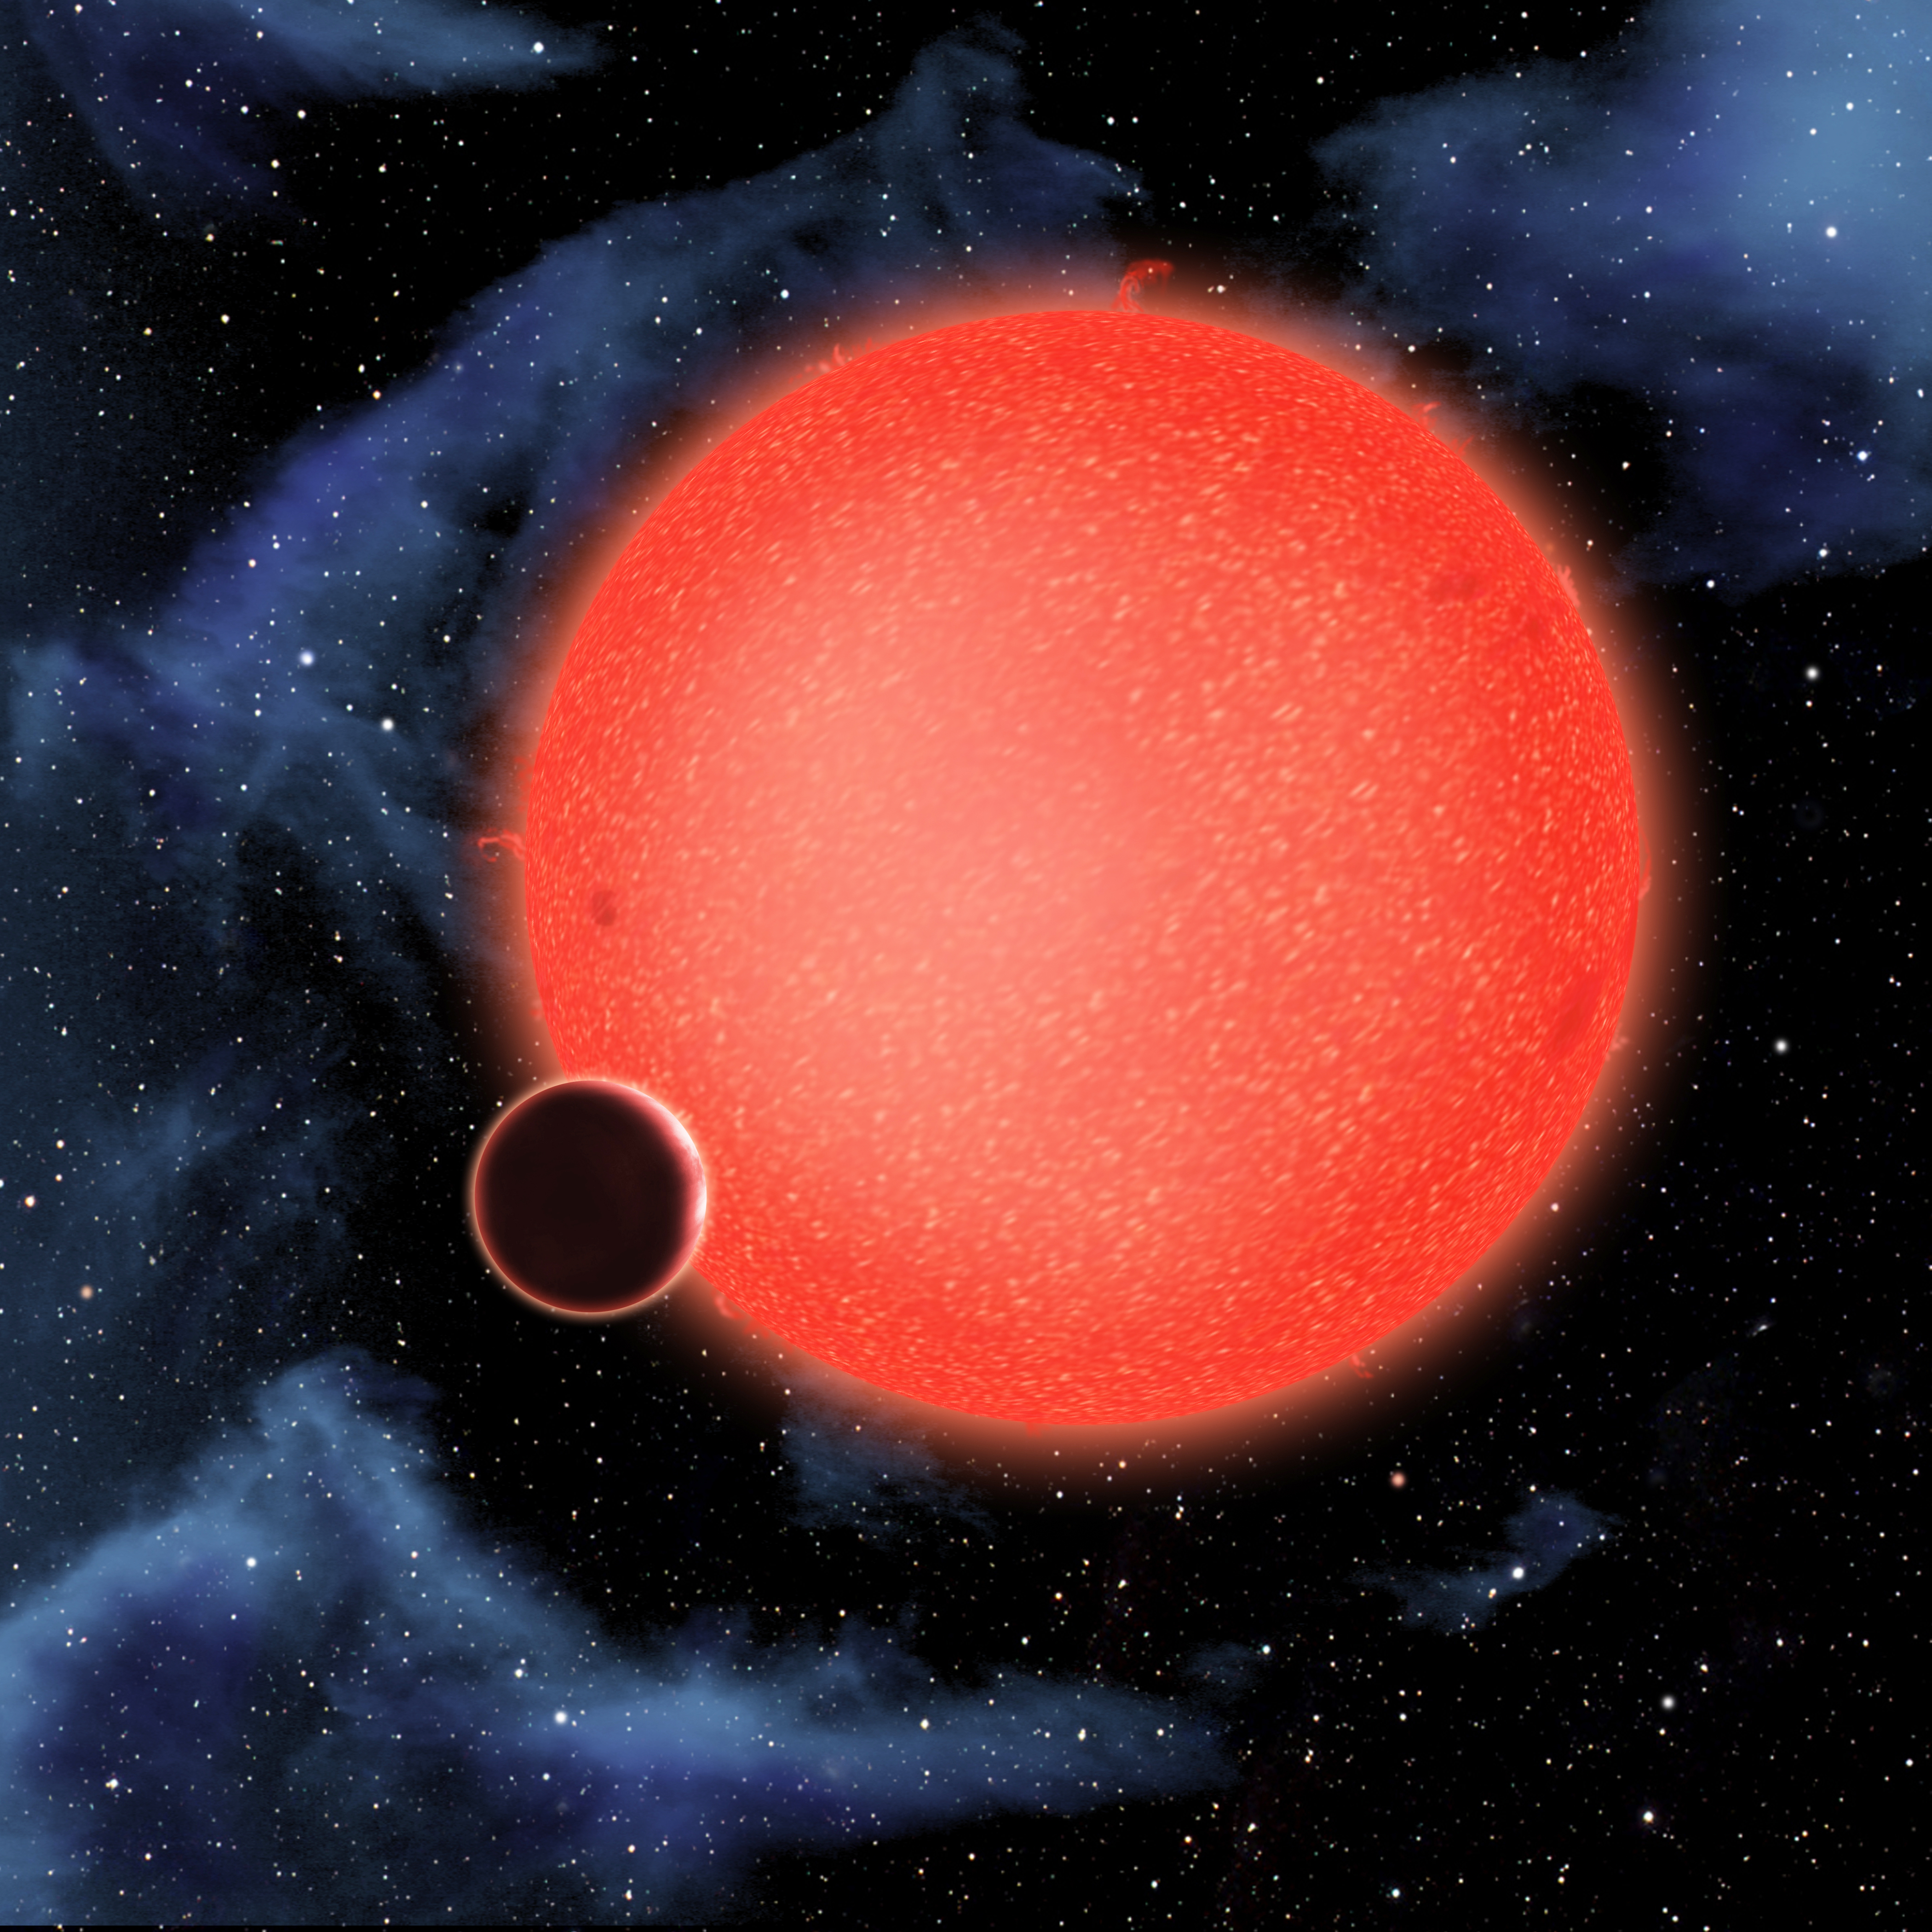

Exoplanet GJ 1214b (artist's impression)

GJ1214b, shown in this artist’s view, is a super-Earth orbiting a red dwarf star 40 light-years from Earth. New observations from the NASA/ESA Hubble Space Telescope show that it is a waterworld enshrouded by a thick, steamy atmosphere. GJ 1214b represents a new type of planet, like nothing seen in the Solar System or any other planetary system currently known.

Credit: NASA, ESA, and D. Aguilar (Harvard-Smithsonian Center for Astrophysics)